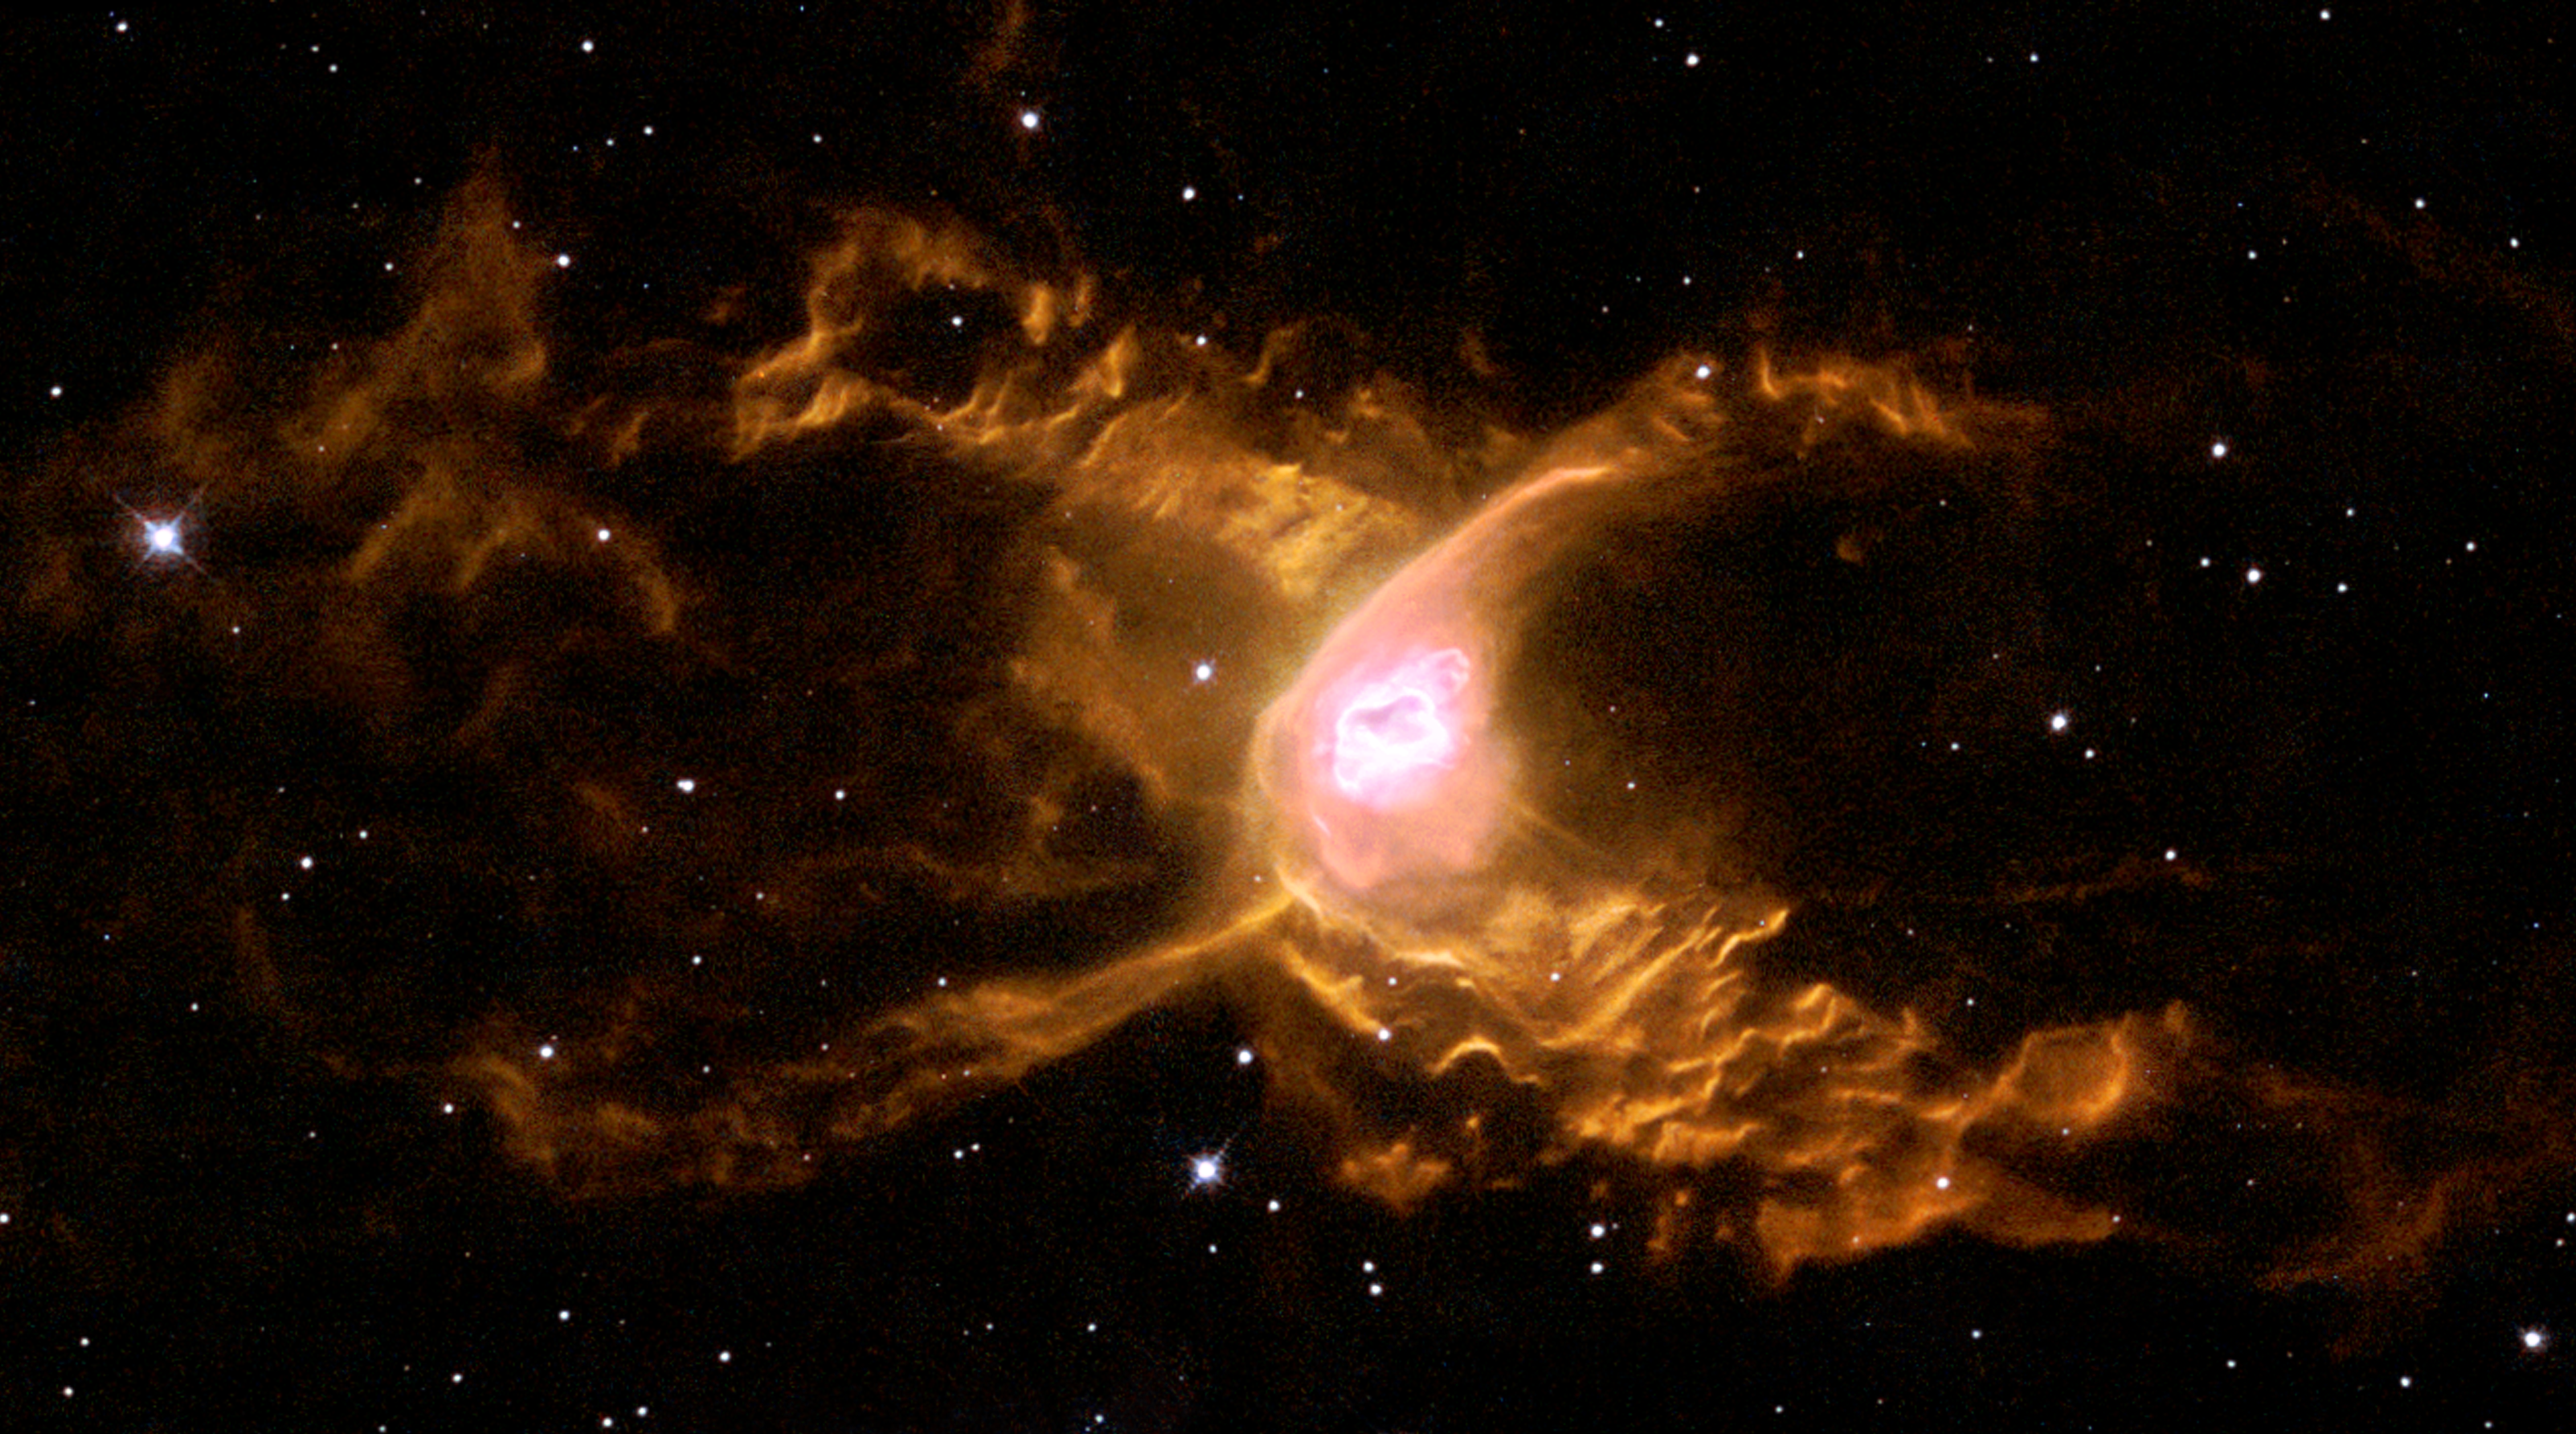

The Red Spider Nebula: surfing in Sagittarius - not for the faint-hearted!

Huge waves are sculpted in this two-lobed nebula some 3000 light-years away in the constellation of Sagittarius. This warm planetary nebula harbours one of the hottest stars known and its powerful stellar winds generate waves 100 billion kilometres high. The waves are caused by supersonic shocks, formed when the local gas is compressed and heated in front of the rapidly expanding lobes. The atoms caught in the shock emit the spectacular radiation seen in this image.

Credit: ESA & Garrelt Mellema (Leiden University, the Netherlands)